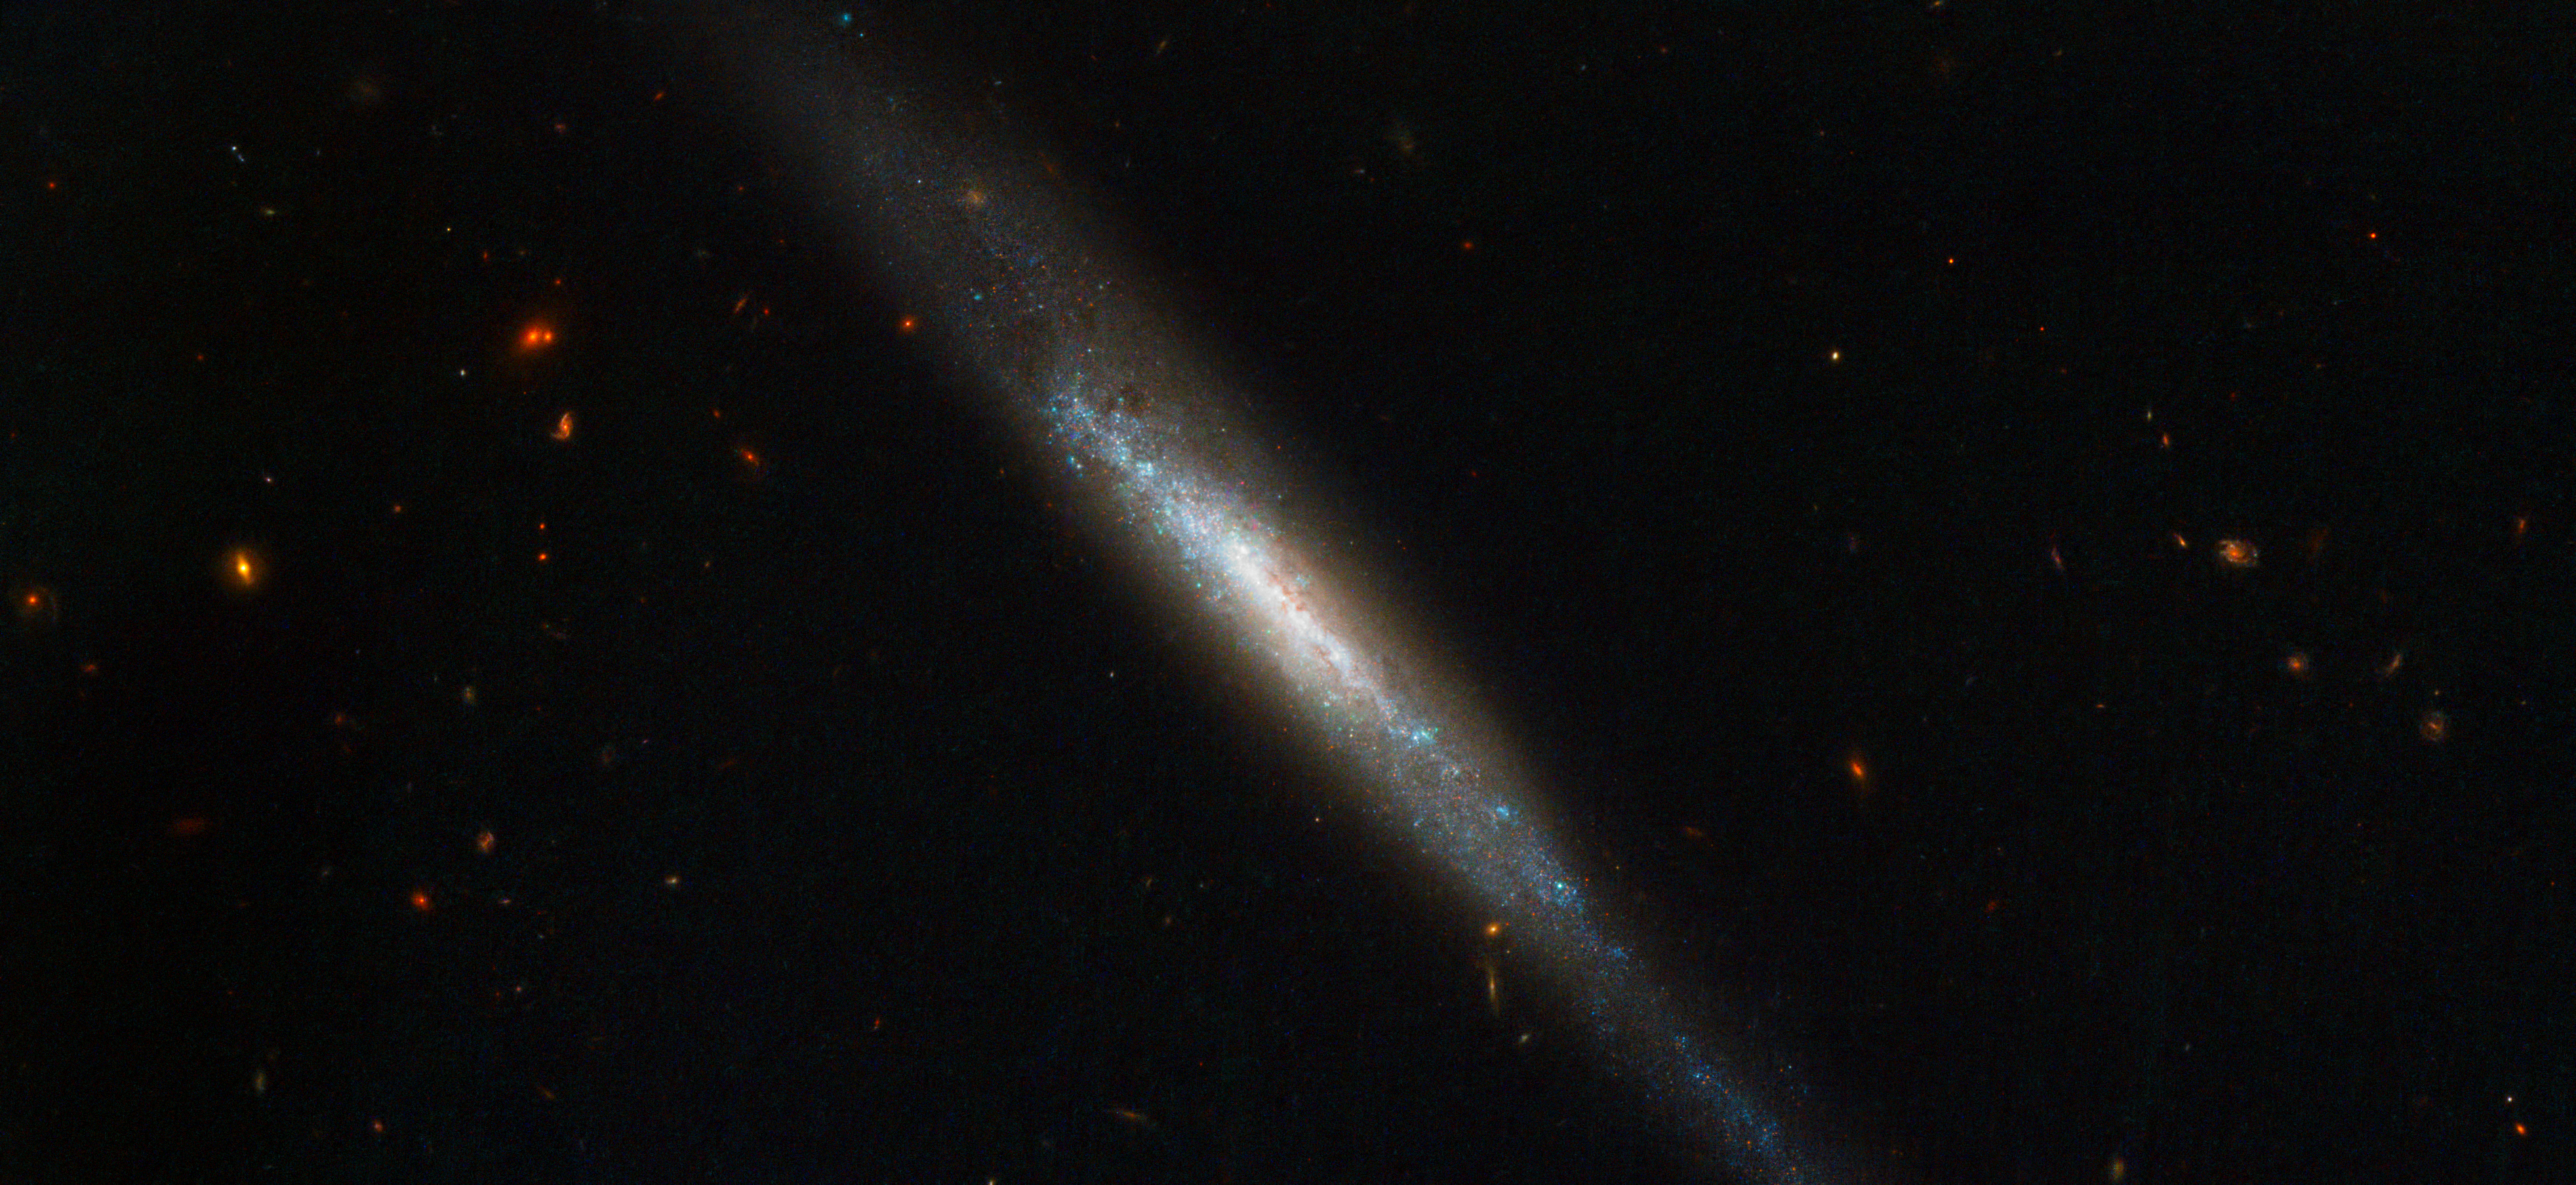

Edge-on galaxy hosts supernova explosion

The NASA/ESA Hubble Space Telescope has imaged an elongated stream of stars, gas and dust called IC 755, which is actually a spiral galaxy that we are seeing edge-on.

In 1999 a star within IC 755 was seen to explode as a supernova and named SN 1999an. The supernova was discovered by the Beijing Astronomical Observatory Supernova Survey and three years later Hubble was used to study the environment in which the explosion took place. The inclination of the galaxy made the supernova a challenging target as many other intervening objects obscured the view. Valuable data were obtained and suggest that before detonation the star may have been around 20 times more massive than our Sun, and that it was likely to have been in the region of 14 million years old.

Supernovae like SN 1999an are classified as Type IIs and they are dramatic events that mark the end of the lives of massive stars. They have an important role to play in galaxy evolution as many elements are formed during the explosion and are ejected with such force that they are distributed far and wide. Shockwaves also help to mix material within the host galaxy and may spark new rounds of star formation. Billions of stars make up galaxies like IC 755 and many will become supernovae, using their final moments to breathe new life into the rest of the Universe.

This picture was created from multiple images taken with the Wide Field Camera of Hubble’s Advanced Camera for Surveys. Exposures through a blue filter (F435W) are coloured blue, exposures through a yellow-green filter (F555W) are coloured green and images through a near-infrared filter (F814W) are shown as red. The total exposure times per filter are 430 s and the field of view is 3.3 x 1.5 arcminutes.

Credit: ESA/Hubble & NASA